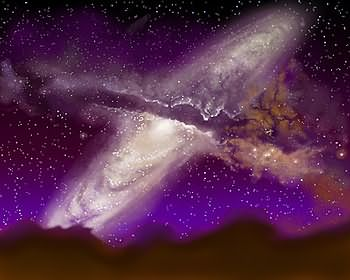

Milky Way/Andromeda collision (artist's impression)

The Hubble telescope has uncovered over 1,000 bright; young star clusters bursting to life in a brief, intense, brilliant "fireworks show" at the heart of a pair of colliding galaxies. This artist's impression shows what it may look like when the Milky Way and Andromeda collide.

Credit: James Gitlin